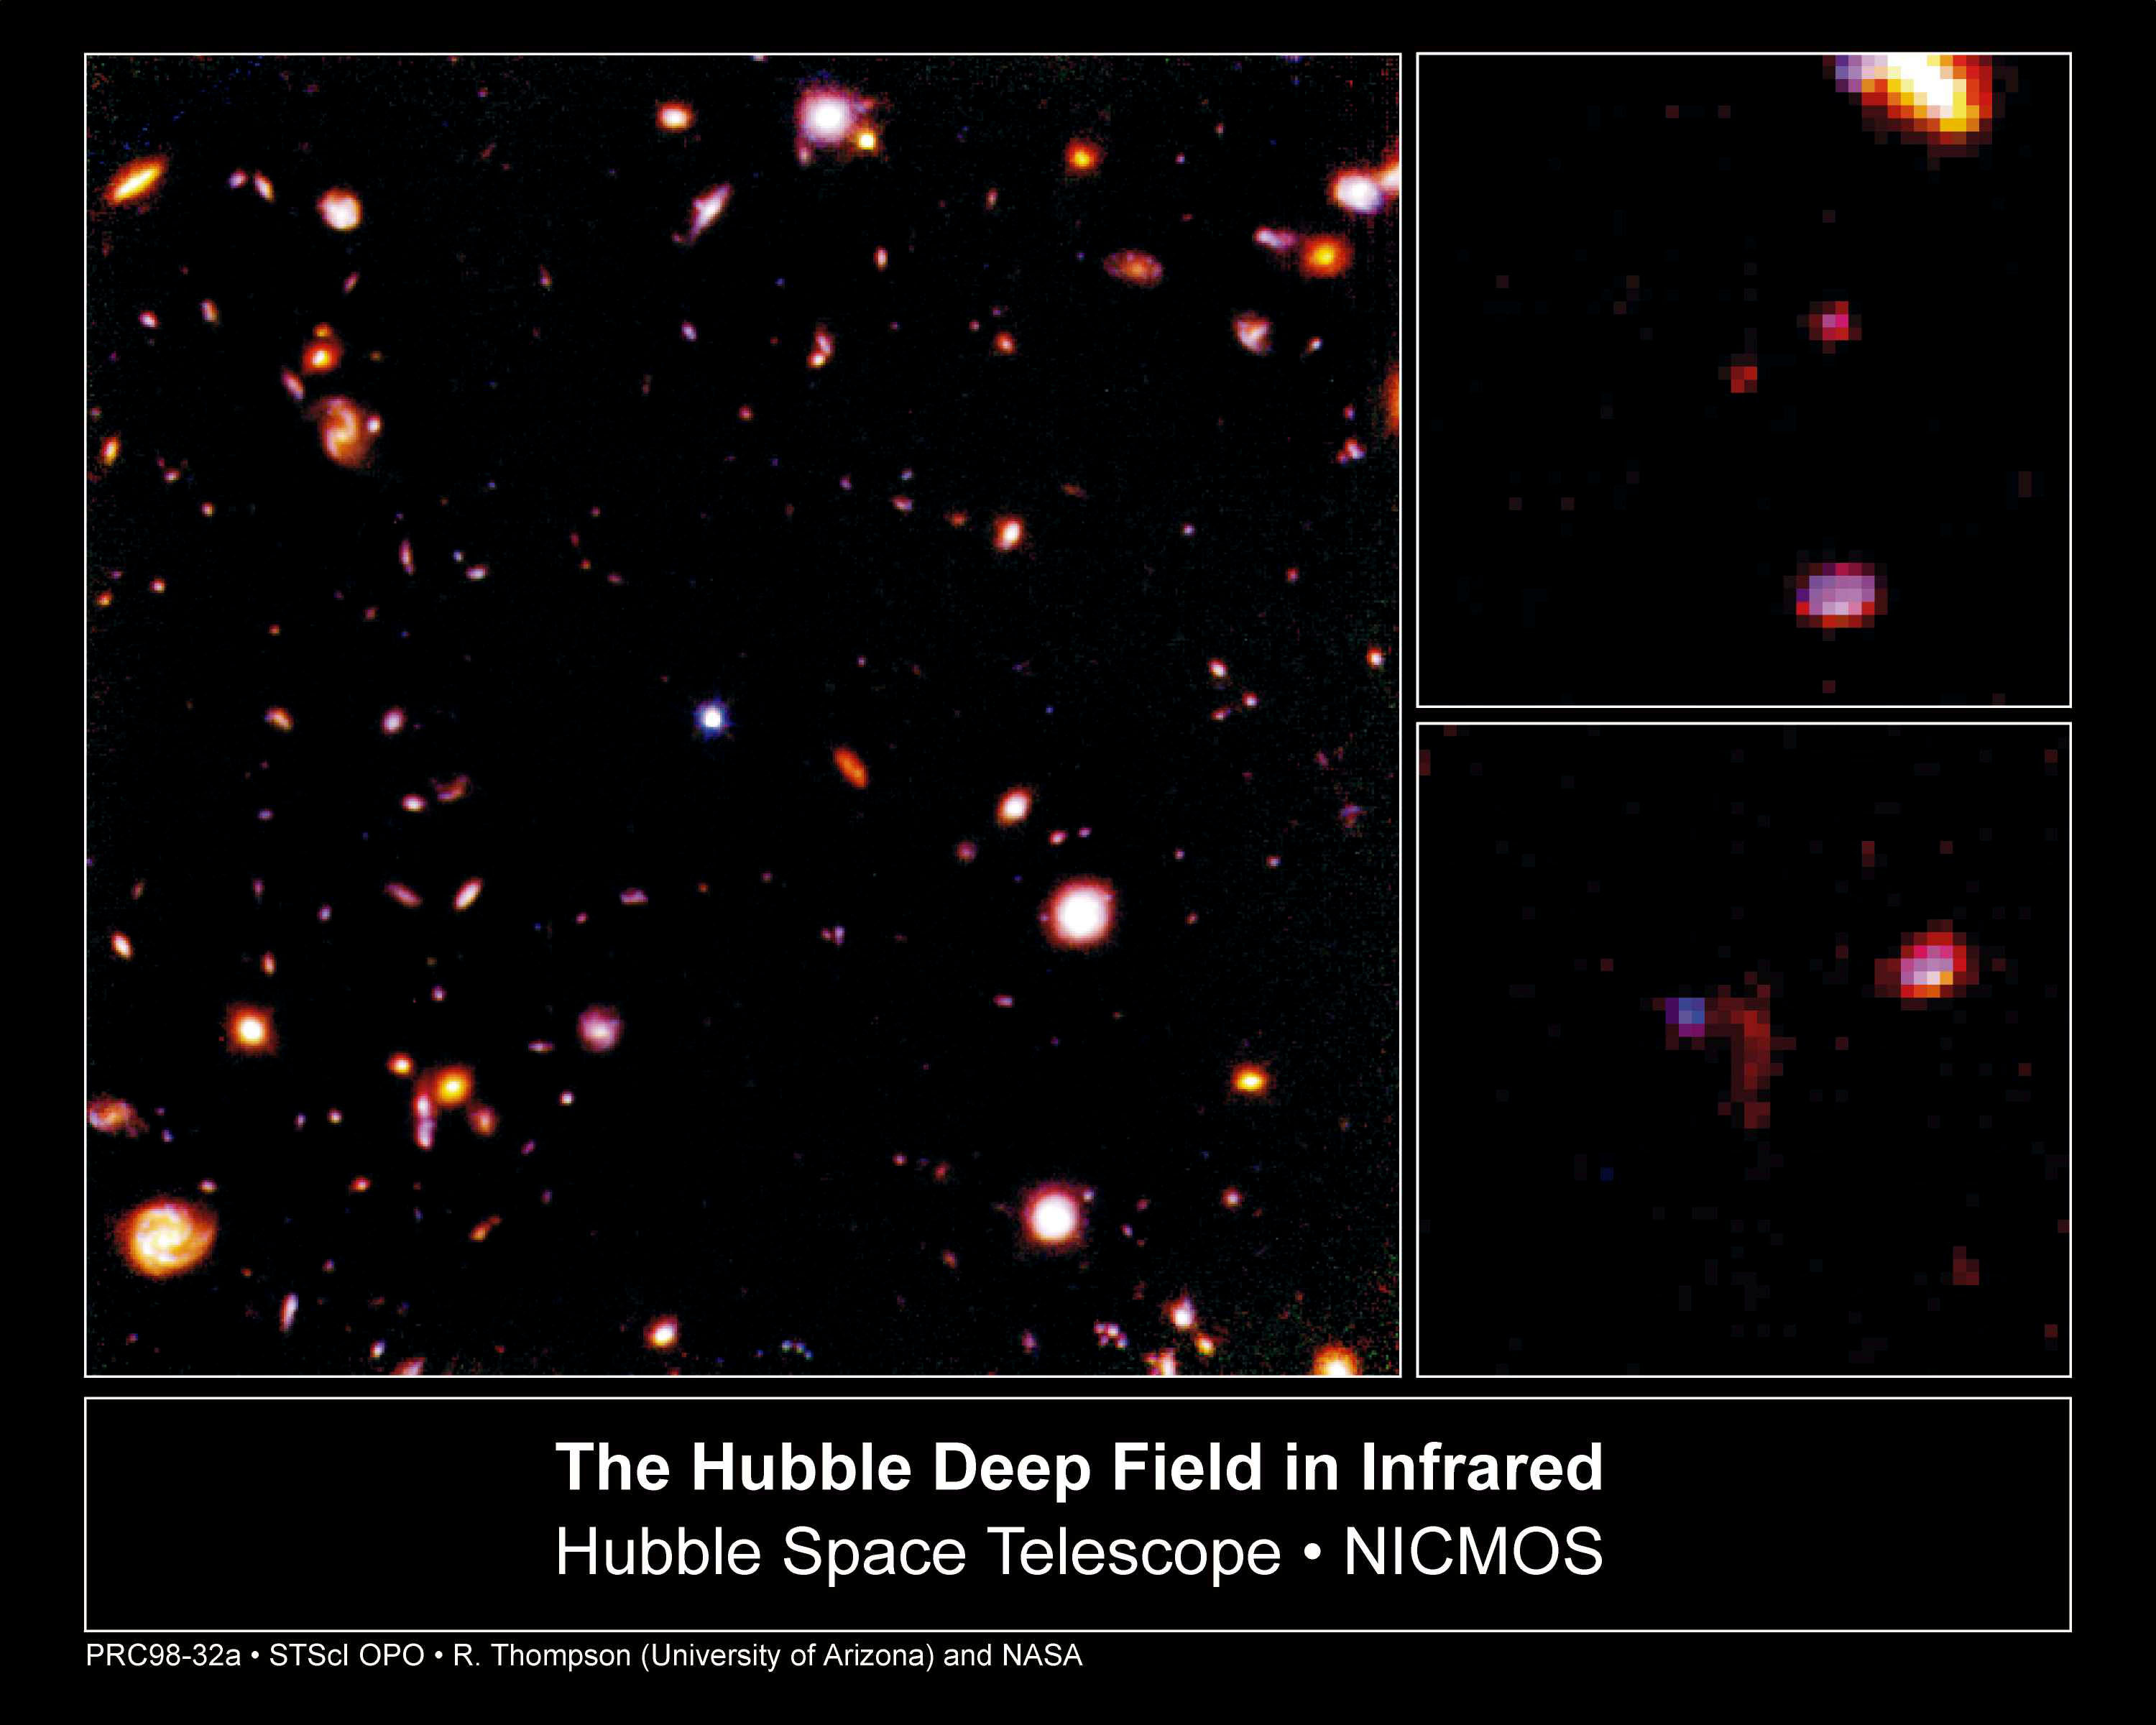

Hubble Deep Field in infrared

A NASA/ESA Hubble Space Telescope view of the faintest galaxies ever seen in the universe, taken in infrared light with the Near Infrared Camera and Multi-Object Spectrometer(NICMOS).

Credit: Rodger I. Thompson (University of Arizona), and NASA/ESA